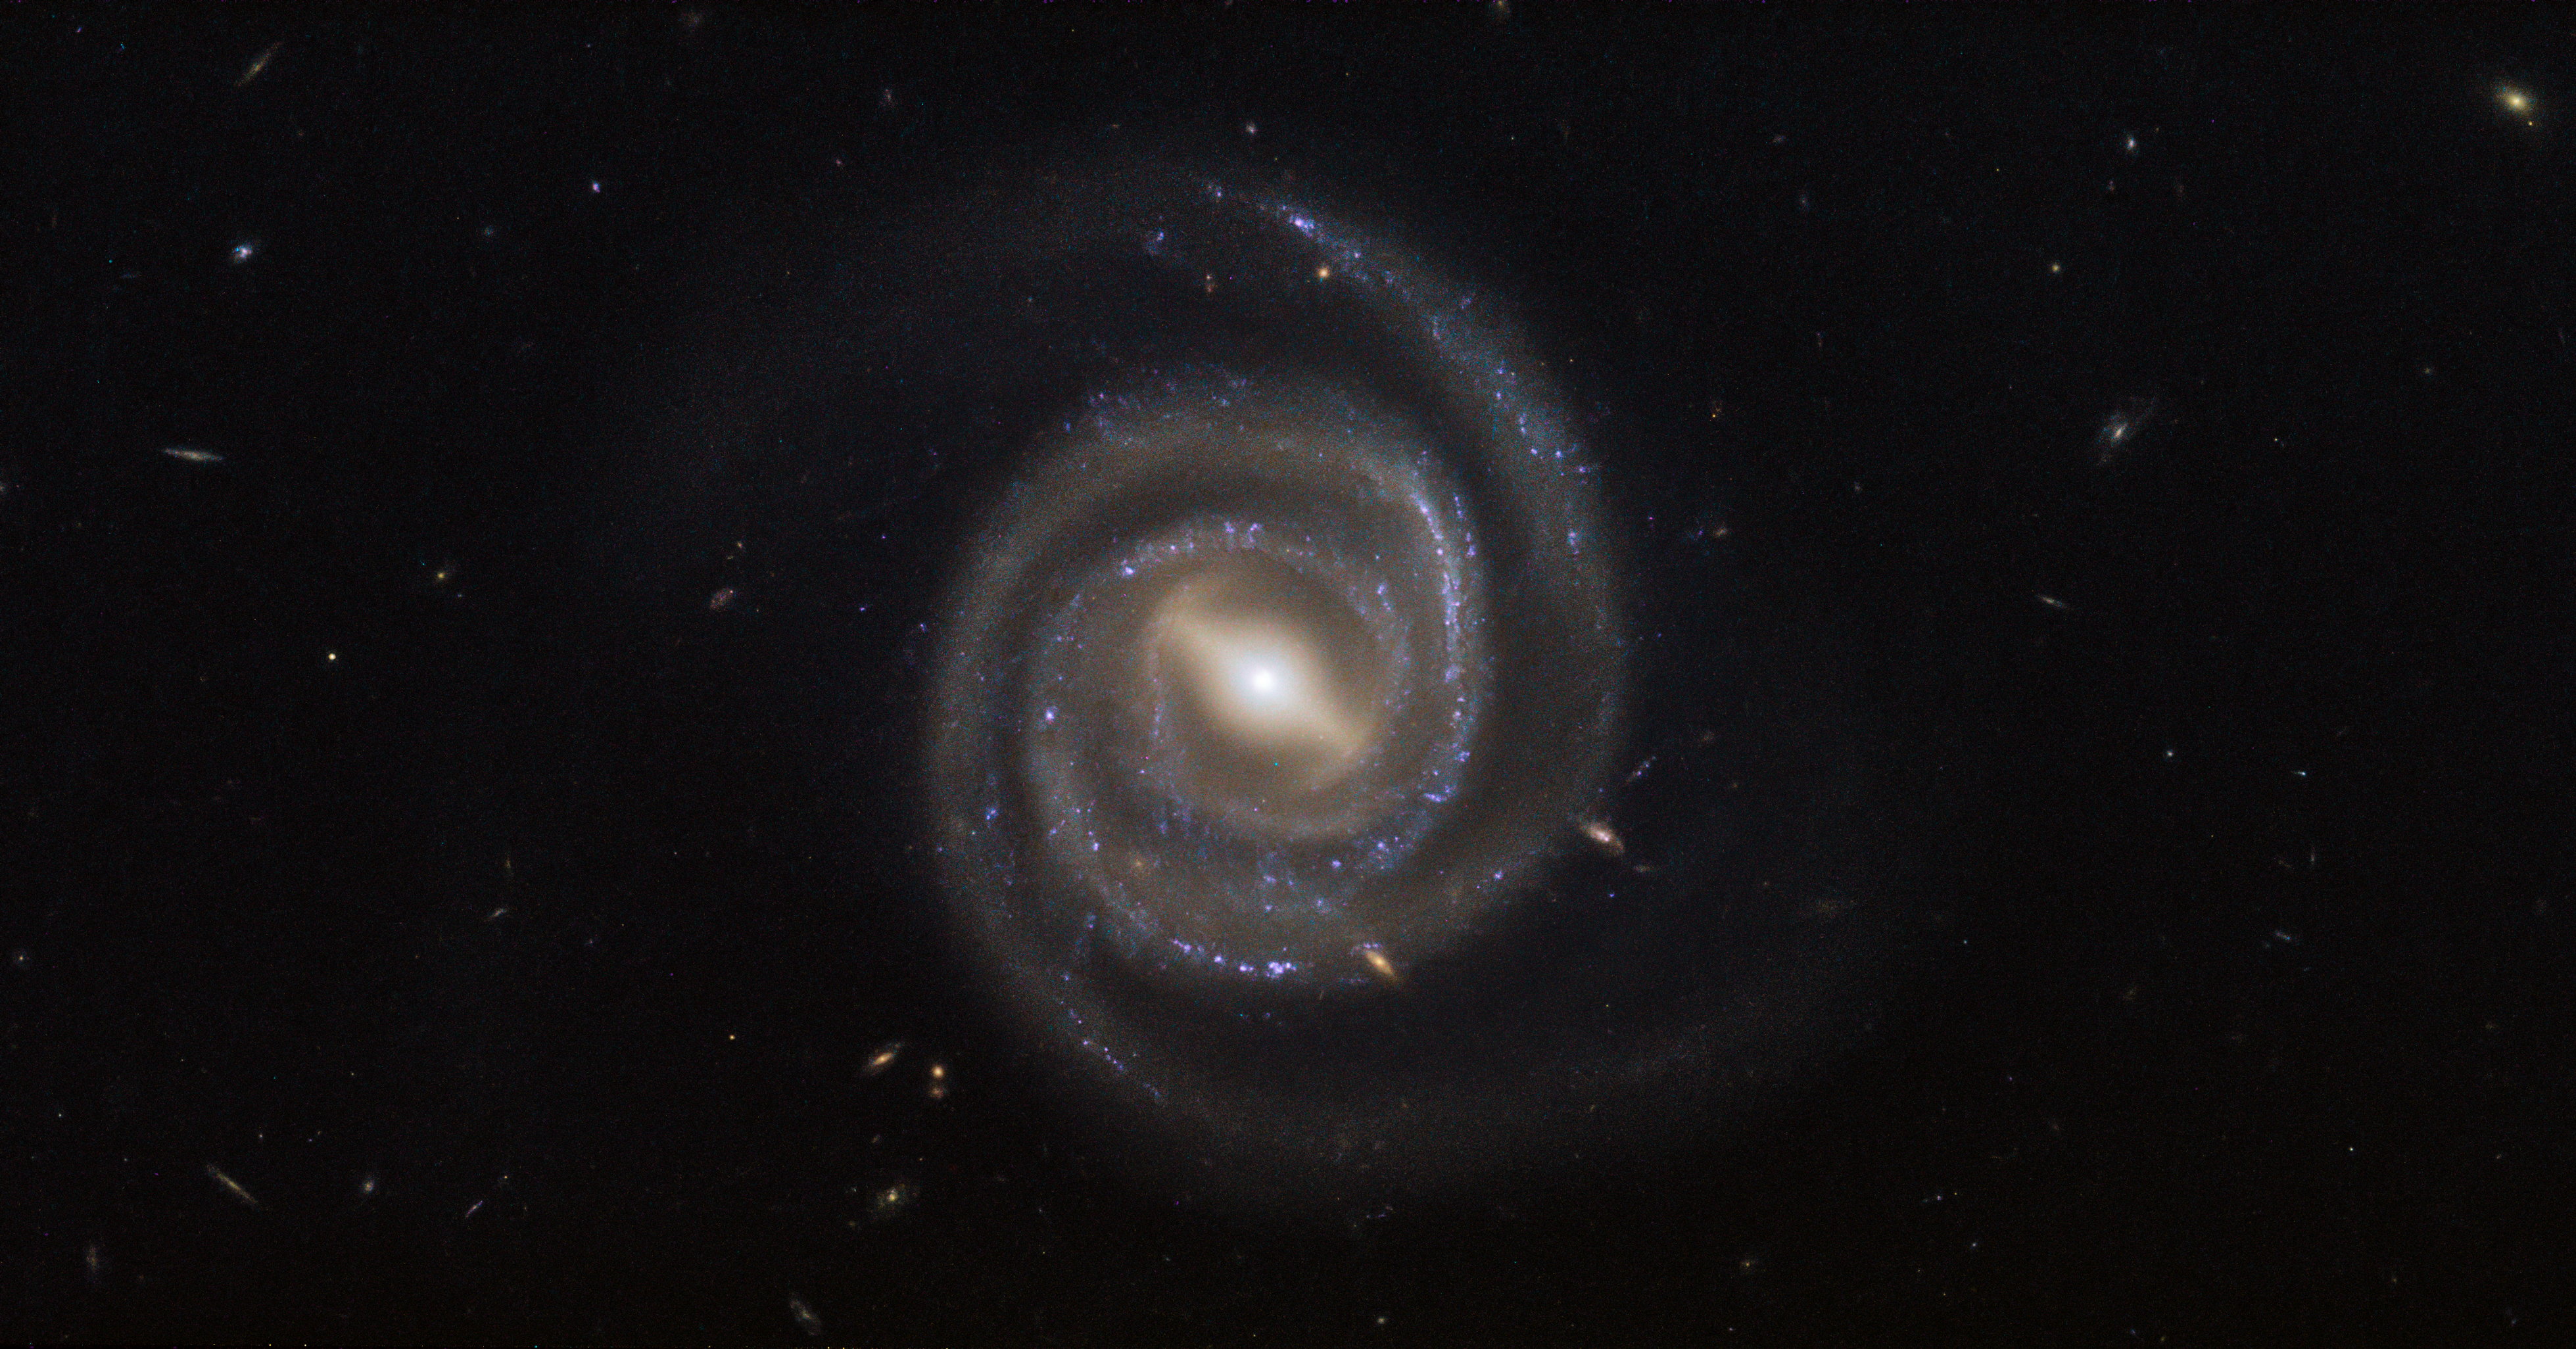

Lasers and supermassive black holes

This image, captured by the NASA/ESA Hubble Space Telescope’s Wide Field Camera 3 (WFC3), shows a galaxy named UGC 6093. As can be easily seen, UGC 6093 is something known as a barred spiral galaxy — it has beautiful arms that swirl outwards from a bar slicing through the galaxy’s centre. It is classified as an active galaxy, which means that it hosts an active galactic nucleus, or AGN: a compact region at a galaxy’s centre within which material is dragged towards a supermassive black hole. As this black hole devours the surrounding matter it emits intense radiation, causing it to shine brightly.

But UGC 6093 is more exotic still. The galaxy essentially acts as a giant astronomical laser that spews out light at microwave, not visible, wavelengths — this type of object is dubbed a megamaser (maser being the term for a microwave laser). Megamasers such as UGC 6093 can be some 100 million times brighter than masers found in galaxies like the Milky Way.

Hubble’s WFC3 observes light spanning a range wavelengths — from the near-infrared, through the visible range, to the near-ultraviolet. It has two channels that detect and process different light, allowing astronomers to study a remarkable range of astrophysical phenomena; for example, the UV-visible channel can study galaxies undergoing massive star formation, while the near-infrared channel can study redshifted light from galaxies in the distant Universe. Such multi-band imaging makes Hubble invaluable in studying megamaser galaxies, as it is able to untangle their intriguing complexity.

Credit: ESA/Hubble & NASA